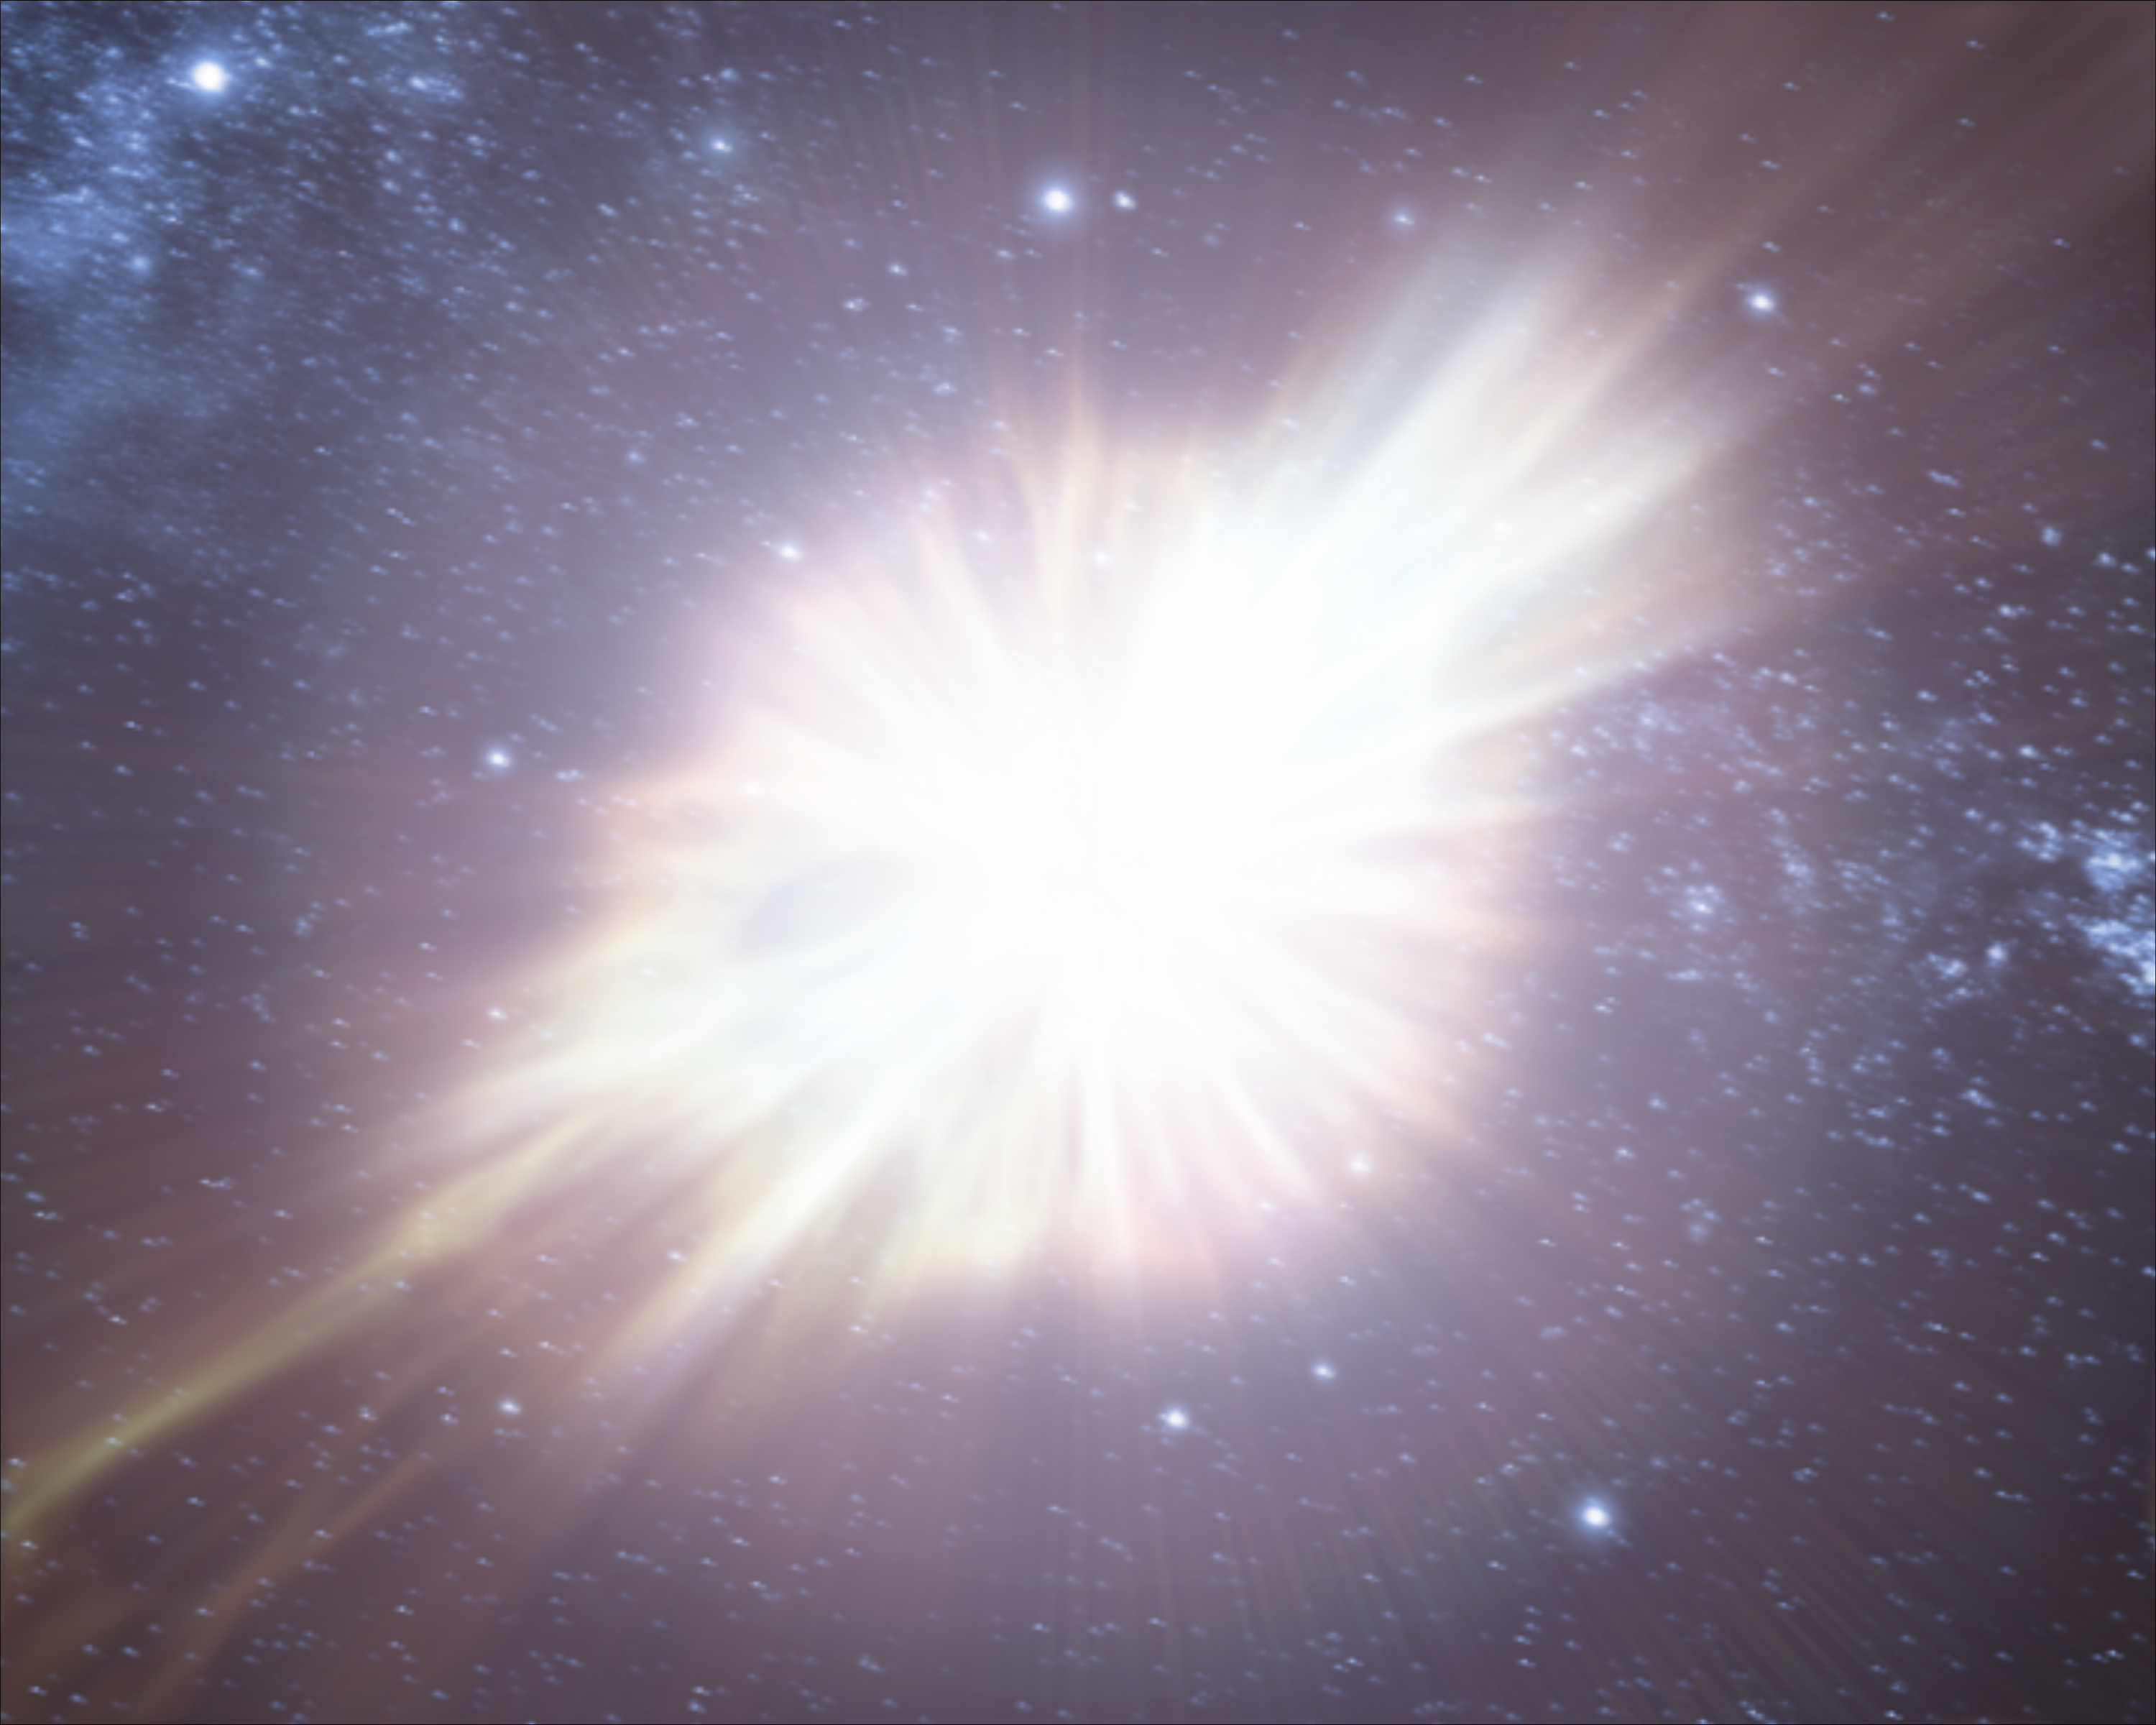

Animation still image 3 (artist's impression)

Still image from the animation of the 1054 supernova that created the Crab Nebula. Note: artist's impression.

Credit: ESA/Hubble